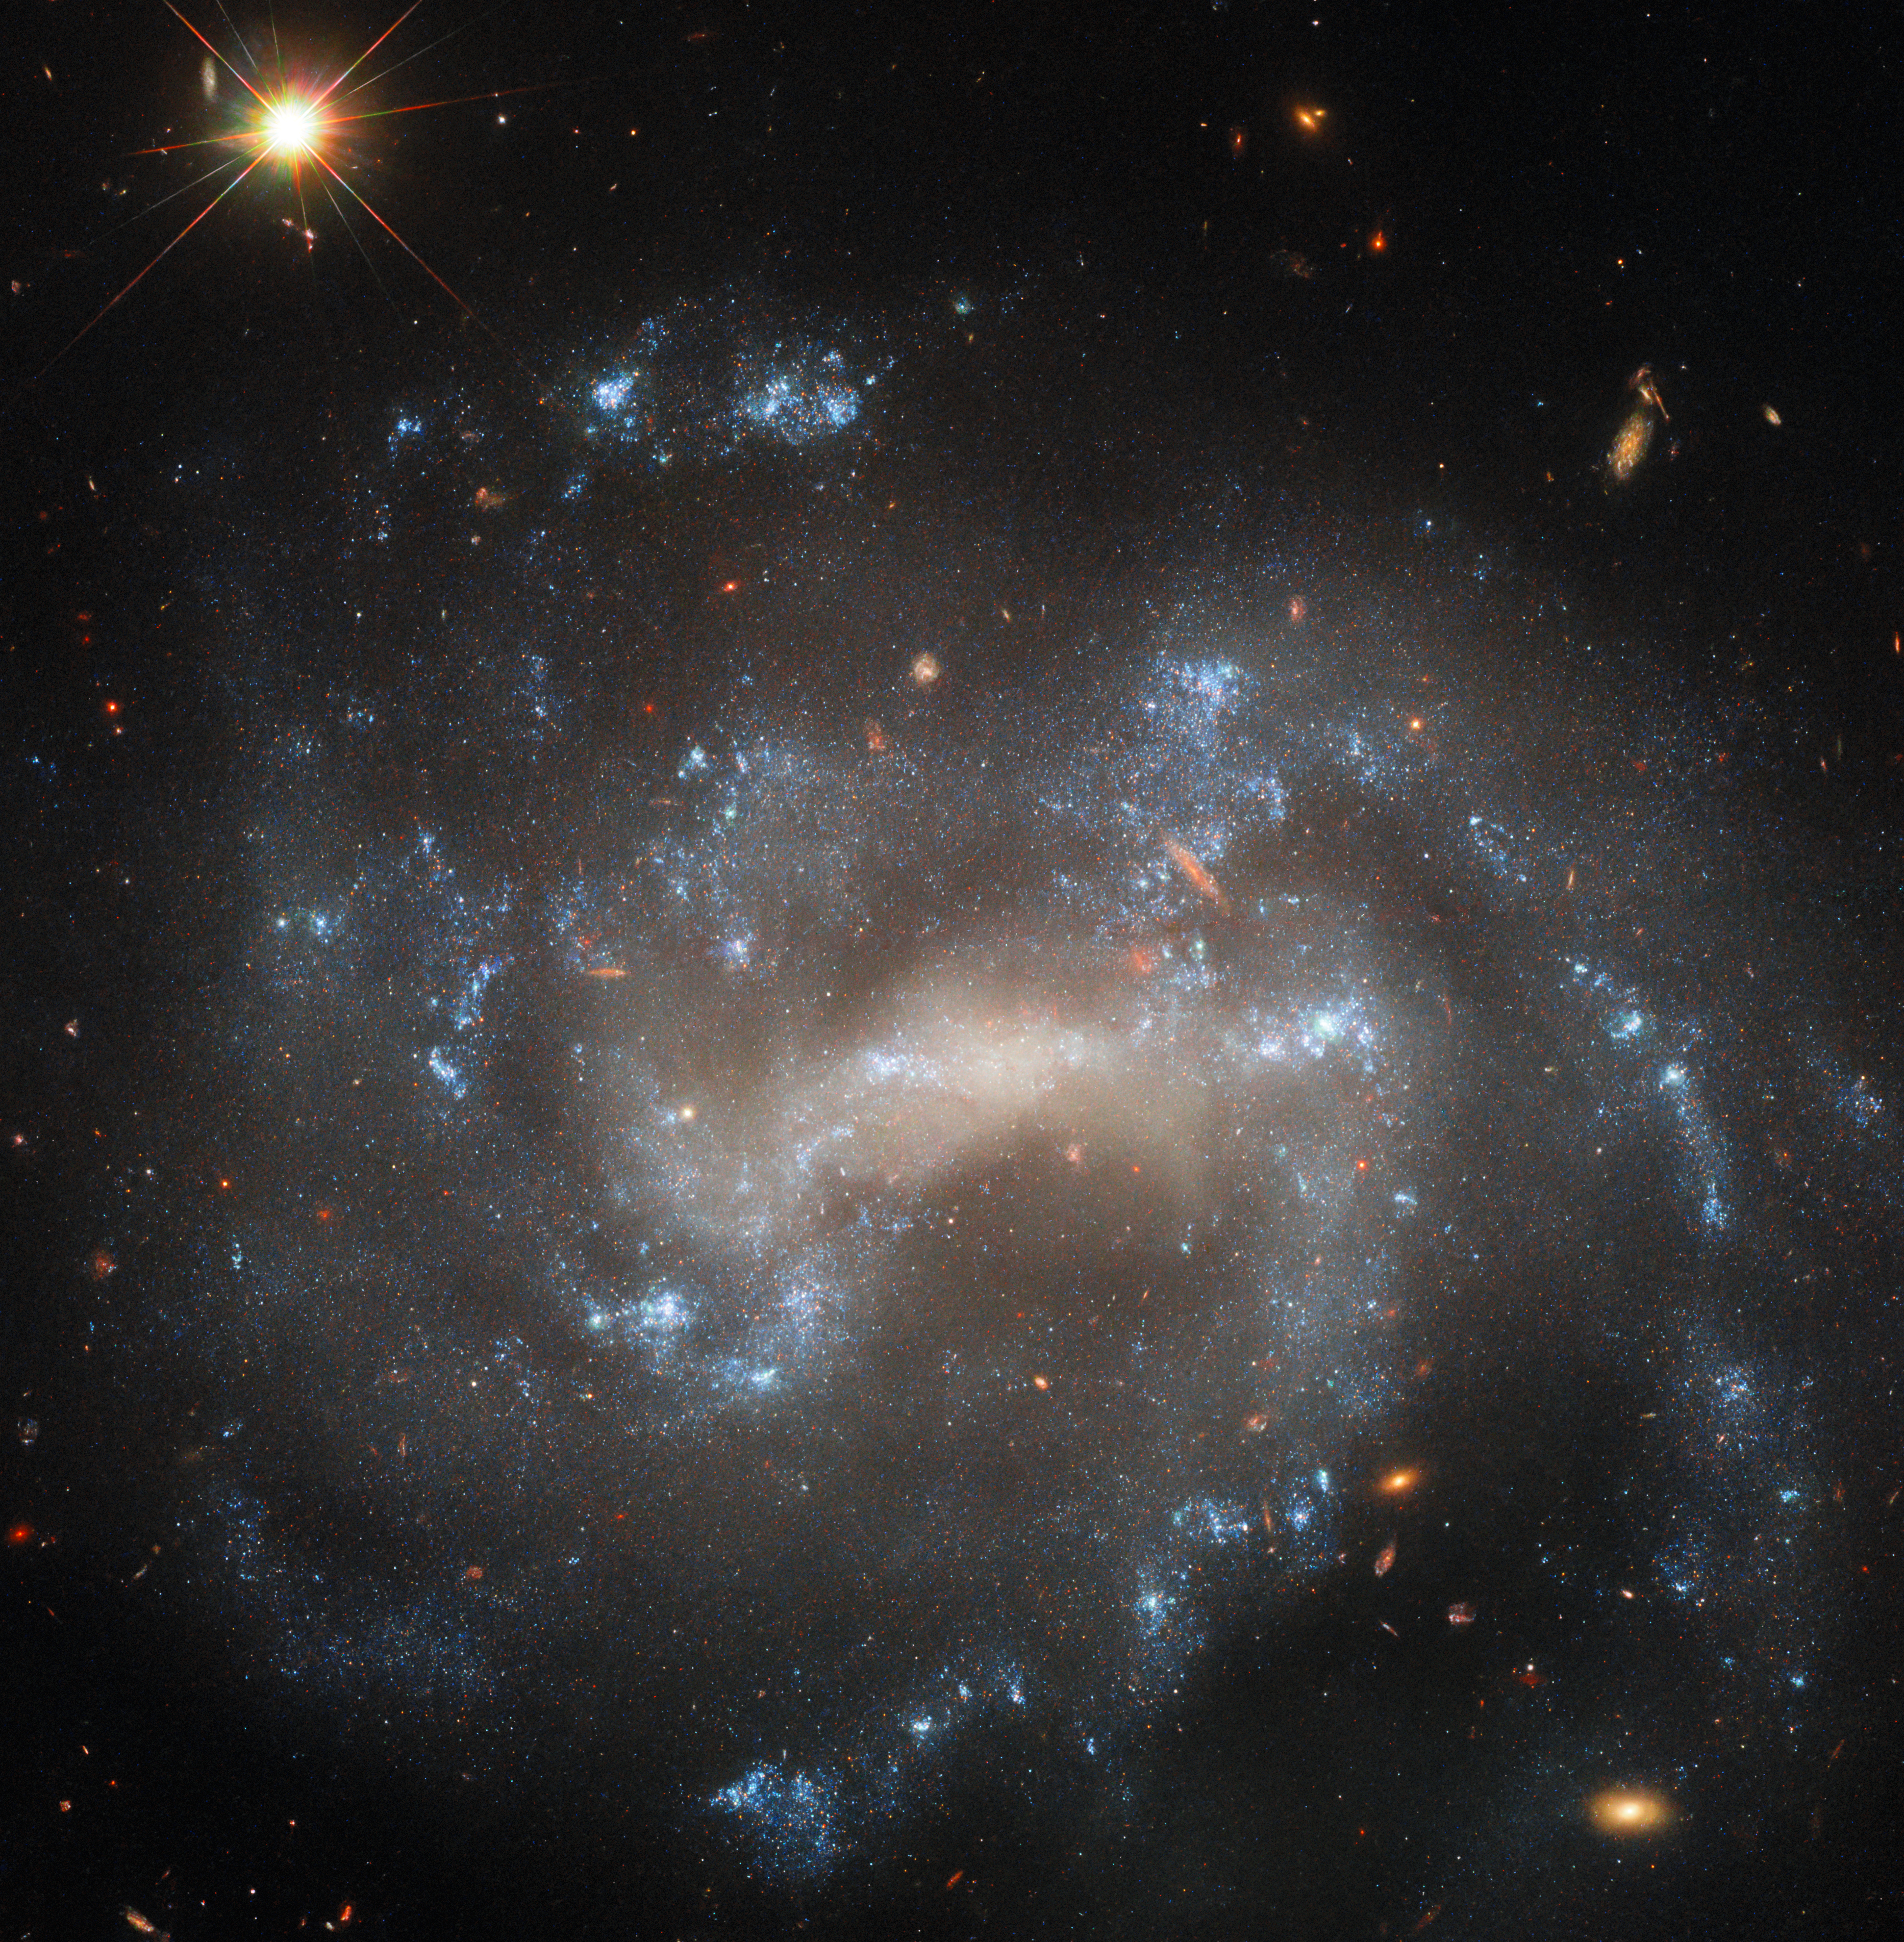

A spiral hiding an impostor

The sparkling spiral galaxy gracing this NASA/ESA Hubble Space Telescope Picture of the Week is UGC 5460, which sits about 60 million light-years away in the constellation Ursa Major. This image combines four different wavelengths of light to reveal UGC 5460’s central bar of stars, winding spiral arms and bright blue star clusters. Also captured in the upper left-hand corner of this image is a far closer object: a star just 577 light-years away in our own galaxy.

UGC 5460 has hosted two recent supernovae named SN 2011ht and SN 2015as. It’s because of these two stellar explosions that Hubble targeted this galaxy, collecting data for three observing programmes that aim to study various kinds of supernovae.

SN 2015as was what’s known as a core-collapse supernova: a cataclysmic explosion that happens when the core of a star far more massive than the Sun runs out of fuel and collapses under its own gravity, initiating a rebound of material outside the core. Hubble observations of SN 2015as will help researchers understand what happens when the expanding shockwave of a supernova collides with the gas that surrounds the exploded star.

SN 2011ht might have been a core-collapse supernova as well, but it could also be an impostor called a luminous blue variable. Luminous blue variables are rare stars that experience eruptions so large that they can mimic supernovae. Crucially, luminous blue variables emerge from these eruptions unscathed, while stars that go supernova do not. Hubble will search for a stellar survivor at SN 2011ht’s location, and the explosion’s identity may be revealed at last.

Credit: ESA/Hubble & NASA, W. Jacobson-Galán, A. Filippenko, J. Mauerhan